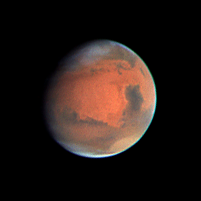

Mars Heading Towards Autumn as Mars Global Surveyor Begins Aerobraking

This NASA/ESA Hubble Space Telescope picture of Mars was taken on September 12, one day after the arrival of the Mars Global Surveyor (MGS) spacecraft and only five hours before the beginning of autumn in the Martian northern hemisphere. (Mars is tilted on its axis like Earth, so it has similar seasonal changes, including an autumnal equinox when the Sun crosses Mars' equator from the northern to the southern hemisphere).

Credit: Phil James (Univ. Toledo) and Steve Lee (Univ. Colorado), and NASA/ESA